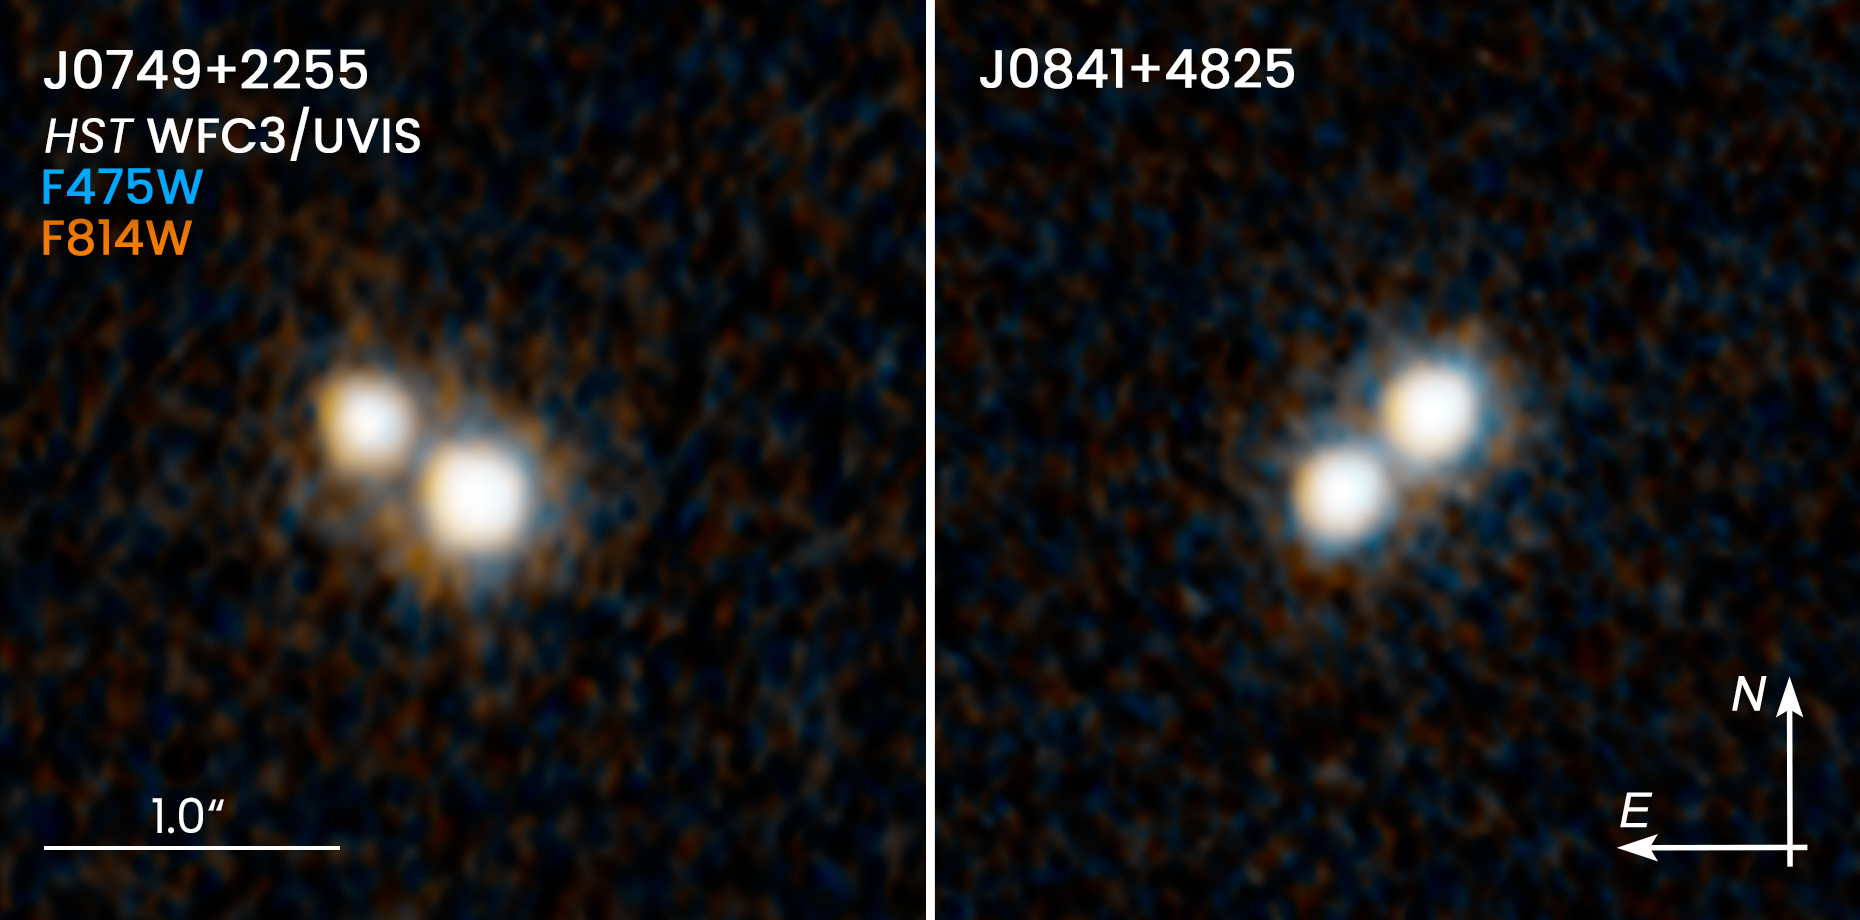

Hubble Resolves Two Pairs of Quasars

These two NASA/ESA Hubble Space Telescope images reveal two pairs of quasars that existed 10 billion years ago and reside at the hearts of merging galaxies. Each of the four quasars resides in a host galaxy. These galaxies, however, cannot be seen because they are too faint, even for Hubble. The quasars within each pair are only about 10,000 light-years apart—the closest ever seen at this cosmic epoch.

Quasars are brilliant beacons of intense light from the centers of distant galaxies that can outshine their entire galaxies. They are powered by supermassive black holes voraciously feeding on infalling matter, unleashing a torrent of radiation.

The quasar pair in the left-hand image is catalogued as J0749+2255; the pair on the right, as J0841+4825. The two pairs of host galaxies inhabited by each double quasar will eventually merge. The quasars will then tightly orbit each other until they eventually spiral together and coalesce, resulting in an even more massive, but solitary black hole.

The image for J0749+2255 was taken 5 January 2020. The J0841+4825 snapshot was taken 30 November 2019. Both images were taken in visible light with Wide Field Camera 3.

Credit: NASA, ESA, H. Hwang and N. Zakamska (Johns Hopkins University), and Y. Shen (University of Illinois, Urbana-Champaign)